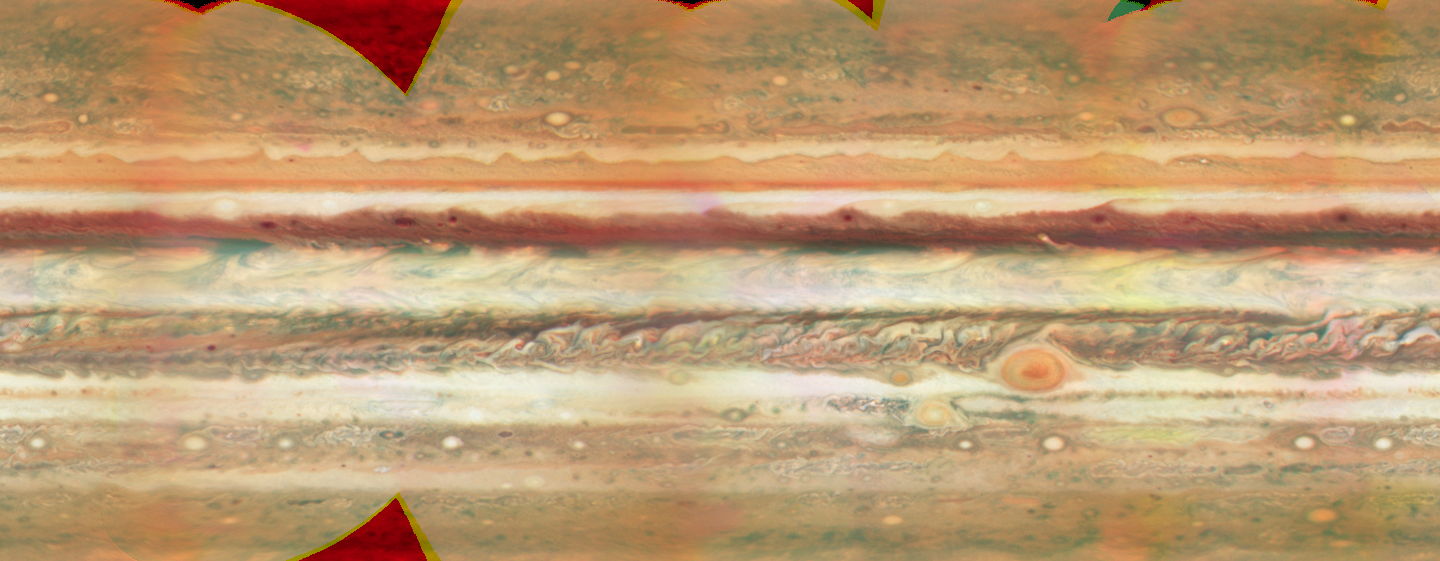

Jupiter Map - Unannotated

False colour cylindrical map of Jupiter, constructed from a set of images of the planet obtained with the WFPC2 on the Hubble Space Telescope. Individual frames were obtained on 9 May and 10 May, 2008. The images were deprojected and mosaiced together. The map shows latitudes between +/-70 deg. The resolution is a quarter degree in latitude and longitude. Images were combined at 673, 502, and 410 nm, as red, green, and blue colours.

Credit: NASA, ESA and M. Wong and I. de Pater (University of California, Berkeley)